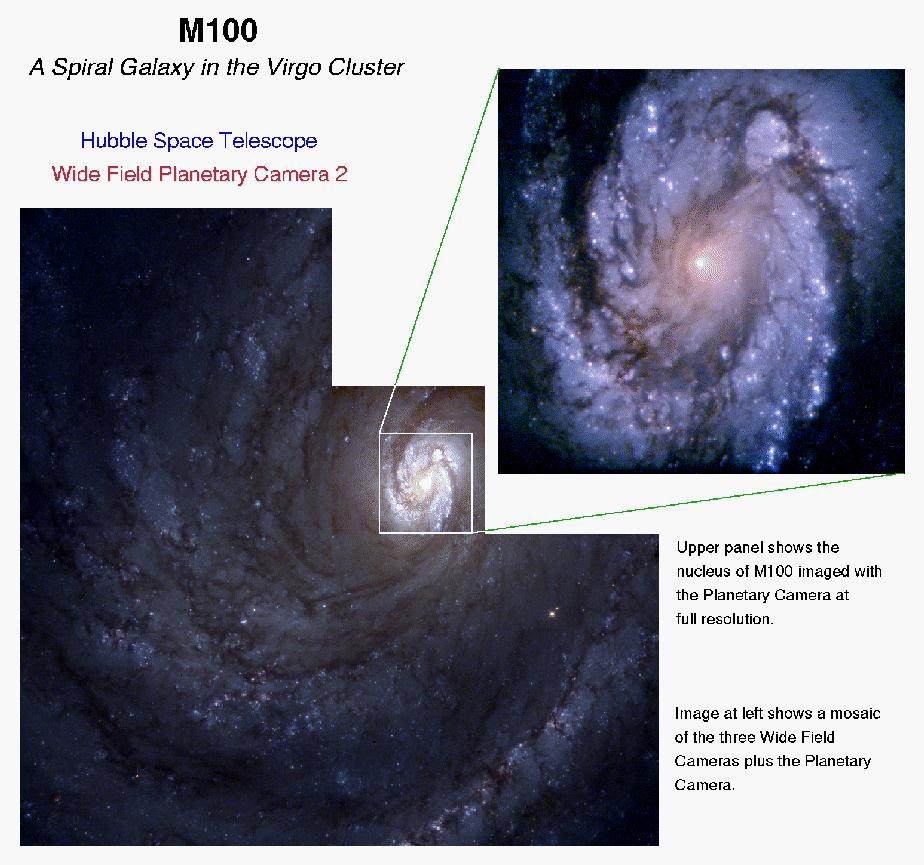

The spiral galaxy M100 as seen with the Hubble's improved vision

An image of the grand design spiral galaxy M100 obtained with the second generation Wide Field and Planetary Camera (WFPC-2), newly installed in the Hubble Space Telescope. Though the galaxy lies several tens of millions of light-years away, modified optics incorporated within the WFPC-2 allow Hubble to view M100 with a level of clarity and sensitivity previously possible only for the very few nearby galaxies that compose our "Local Group." Just as one does not learn about the diversity of mankind by conversing only with your next door neighbor, astronomers must study many galaxies in a host of different environments if they are to come to understand how our own galaxy, out star, and our earth came to be. By expanding the region of the universe that can be studied in such detail a thousand fold, the WFPC-2 will help the Hubble Space Telescope to fulfill this mission.

One of the greateset gains of the high resolution provided by Hubble is the Ability to resolve individual stars in other galaxies. The new camera not only allows astronomers to separate stars which would have been blurred together at the resolution available from the ground, but also allows astronomets to accurately measure the light form very faint stars. The quantitative study of compositions, ages, temperatures, and other properties of stars and gas in other galaxies will provide important clues about how galaxies form and evolve.

Credit: NASA/ESA, STScI